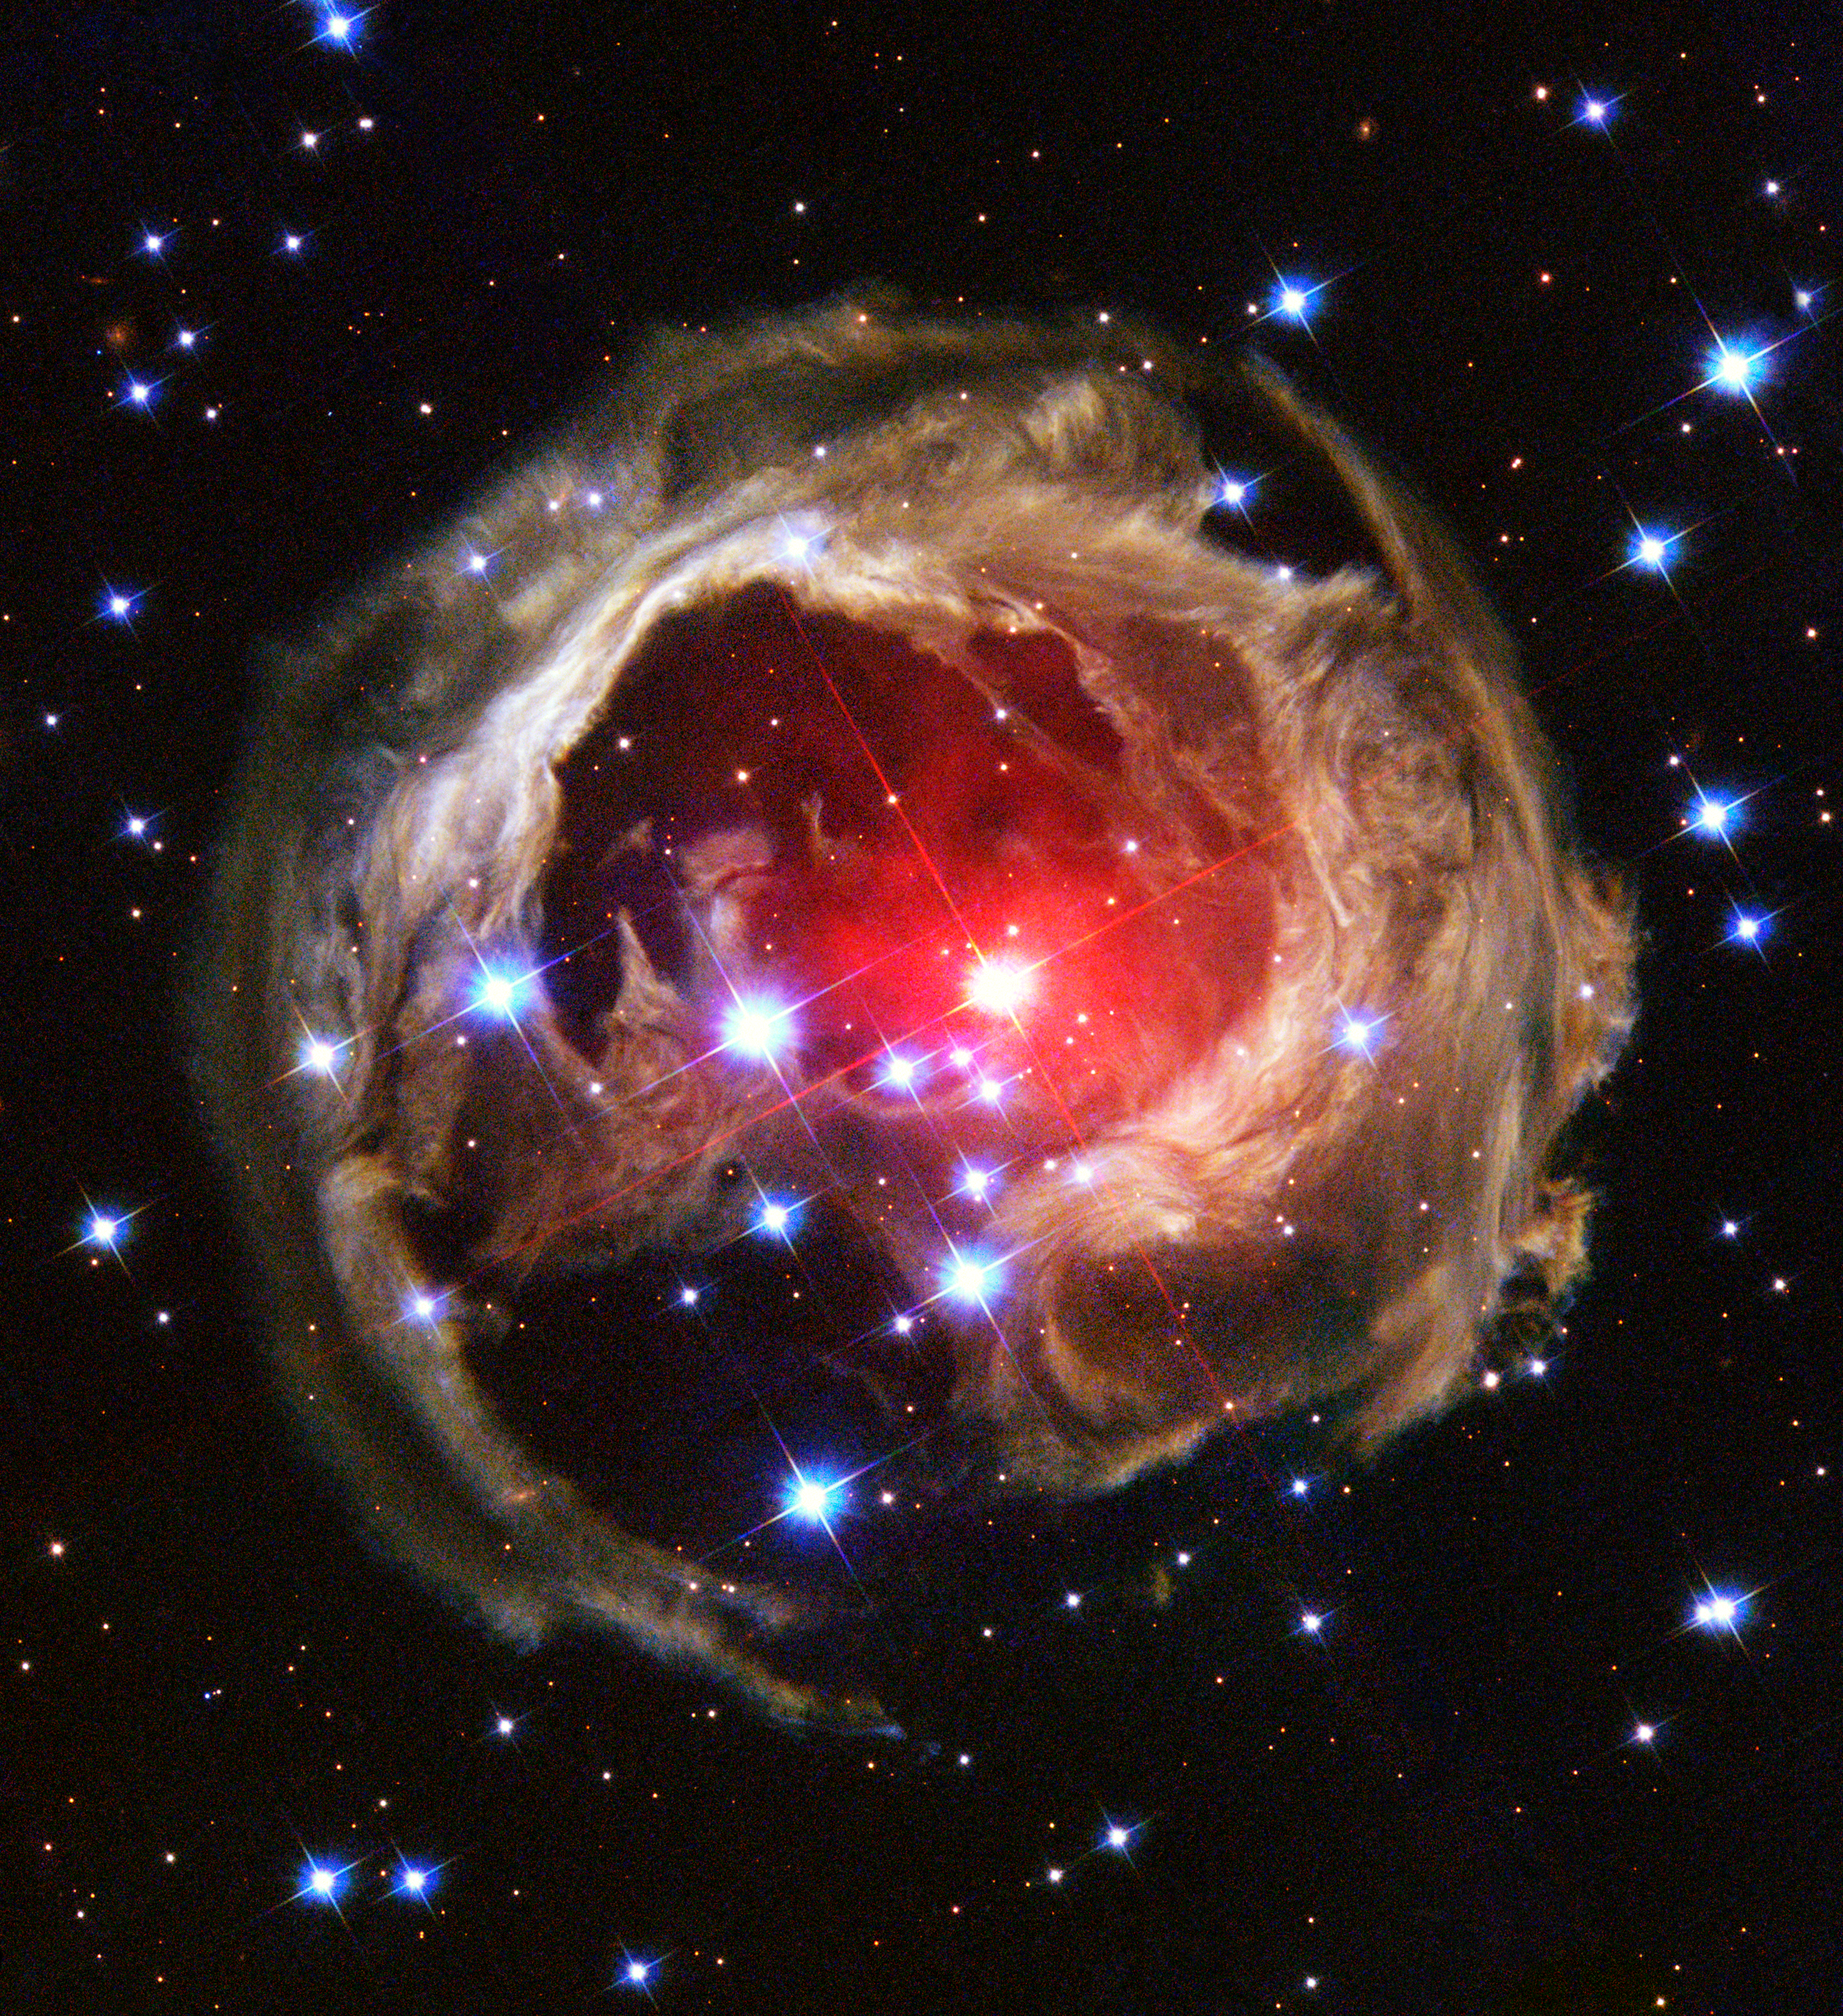

V838 Monocerotis revisited: Space phenomenon imitates art

"Starry Night", Vincent van Gogh's famous painting, is renowned for its bold whorls of light sweeping across a raging night sky. Although this image of the heavens came only from the artist's restless imagination, a new picture from the NASA/ESA Hubble Space Telescope bears remarkable similarities to the van Gogh work, complete with never-before-seen spirals of dust swirling across trillions of kilometres of interstellar space.

This image, obtained with the Advanced Camera for Surveys on February 8, 2004, is Hubble's latest view of an expanding halo of light around a distant star, named V838 Monocerotis (V838 Mon). The illumination of interstellar dust comes from the red supergiant star at the middle of the image, which gave off a flashbulb-like pulse of light two years ago. V838 Mon is located about 20,000 light-years away from Earth in the direction of the constellation Monoceros, placing the star at the outer edge of our Milky Way galaxy.

Credit: NASA, the Hubble Heritage Team (AURA/STScI) and ESA